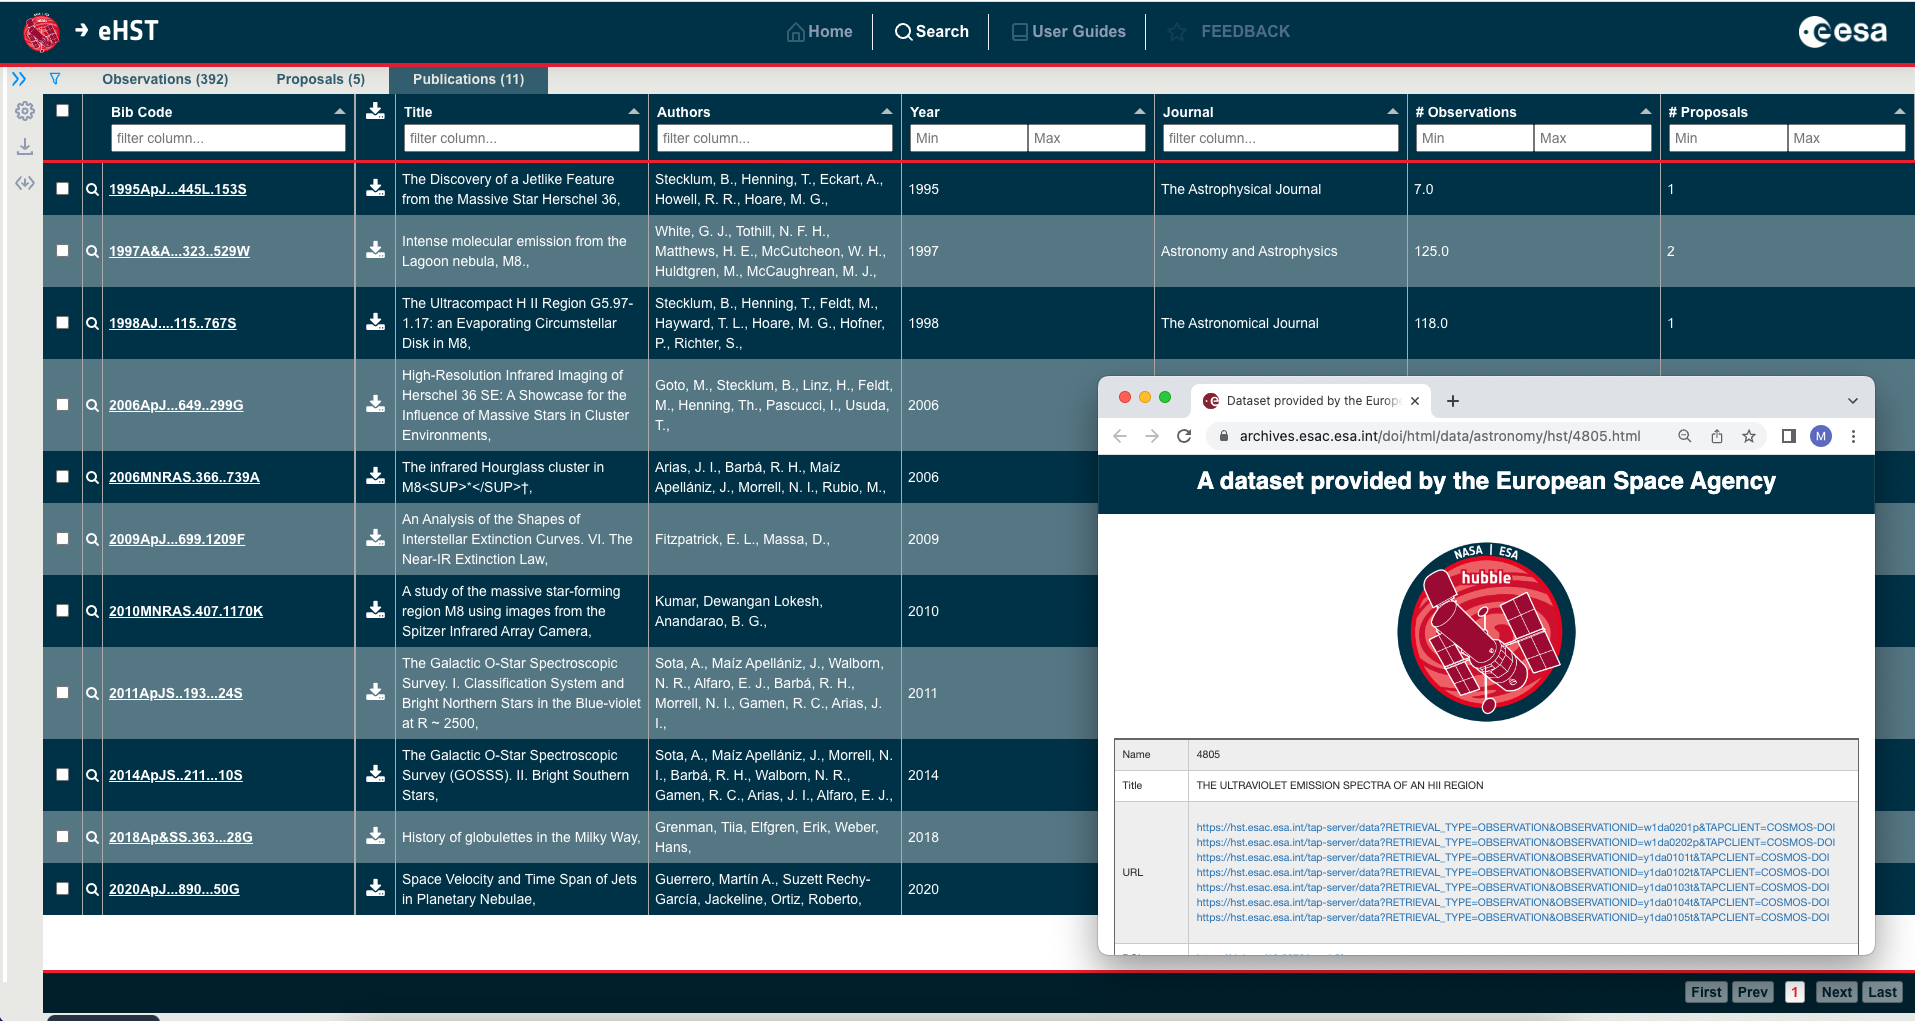

eHST User Interface

This is a screenshot from eHST showing publications related to a target of interest, with links to the datafiles from a given programme (in subset panel).

Credit: ESA/Hubble